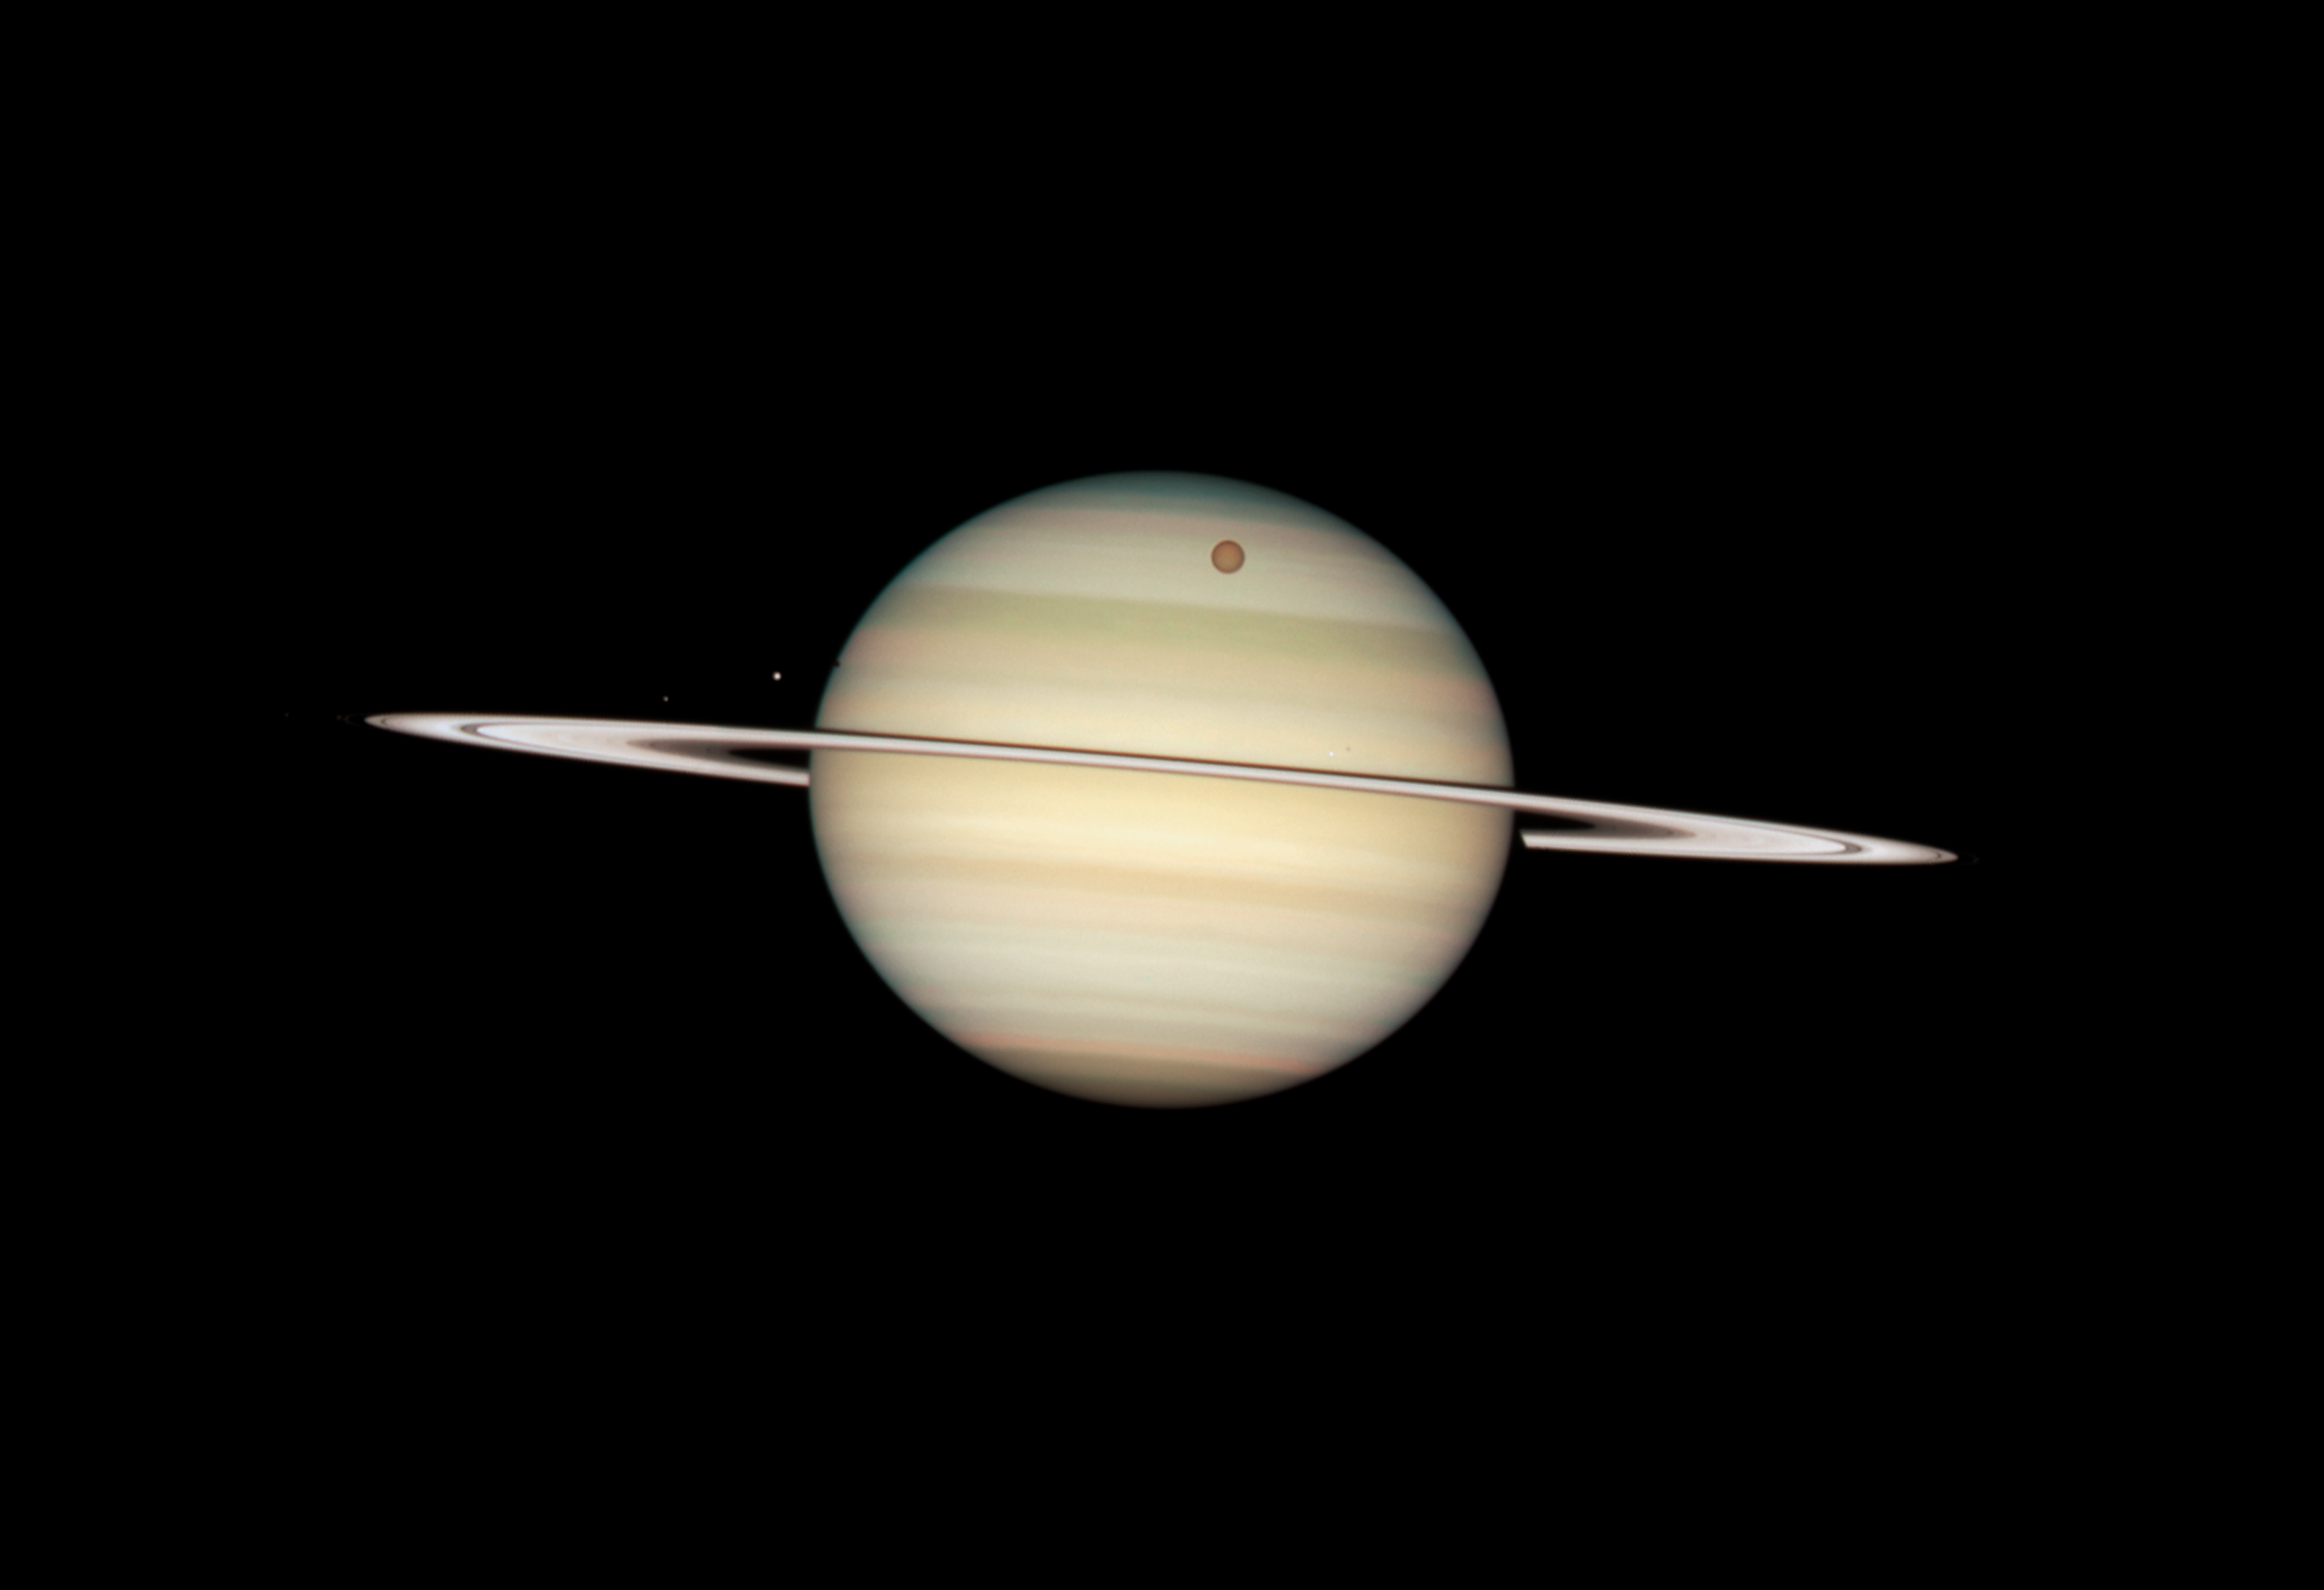

Quadruple Saturn moon transit snapped by Hubble

Hubble Space Telescope Image of Saturn: 24 February 2009 14:25 UT

Credit: NASA, ESA and the Hubble Heritage Team (STScI/AURA). Acknowledgment: M. Wong (STScI/UC Berkeley) and C. Go (Philippines)